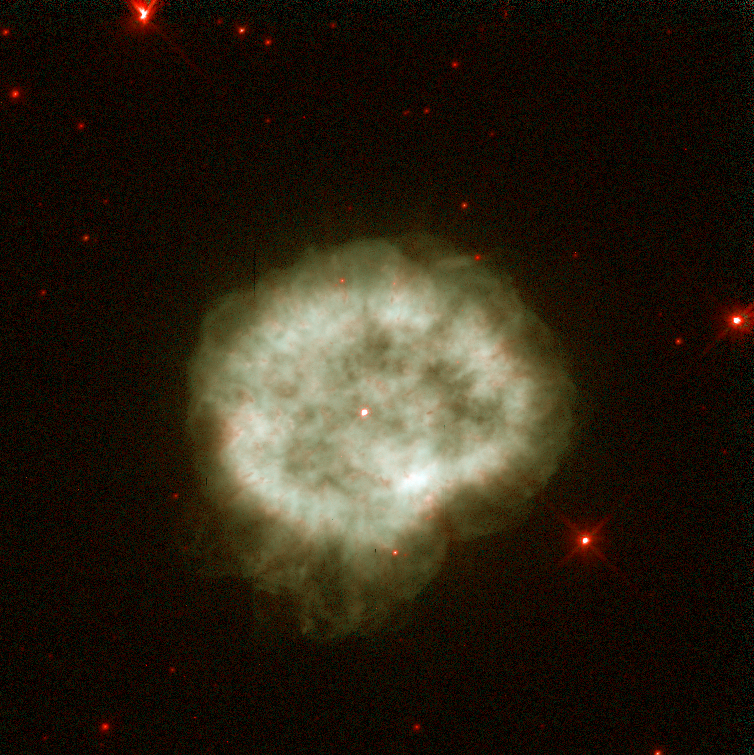

NGC 2867

This image is a part of the Hubble Gallery of Planetary Nebulae.

Credit: Howard Bond (ST ScI) and NASA/ESA